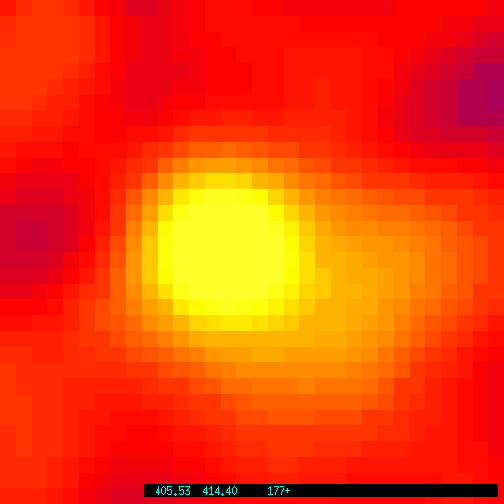

Hubble tracks the fading optical counterpart of a gamma ray burst

The refurbished Hubble Space Telescope has made an important contribution toward solving one of astronomy's greatest enigmas by allowing astronomers to continue watching the fading visible-light counterpart of a gamma-ray burst (GRB), one of the most energetic and mysterious events in the universe.

The so-called optical counterpart is presumably a cooling fireball from the catastrophic event that triggered the massive burst of invisible gamma rays -- the highest-energy radiation in the universe. This event may have unleashed as much energy in a few seconds as the Sun does in ten billion years!

Credit: The Space Telescope Science Institute is operated by the Associationof Universities for Research in Astronomy, Inc. (AURA), for NASA, undercontract with the Goddard Space Flight Center, Greenbelt, MD. The Hubble Space Telescope is a project of internationalcooperation between NASA and the European Space Agency (ESA)